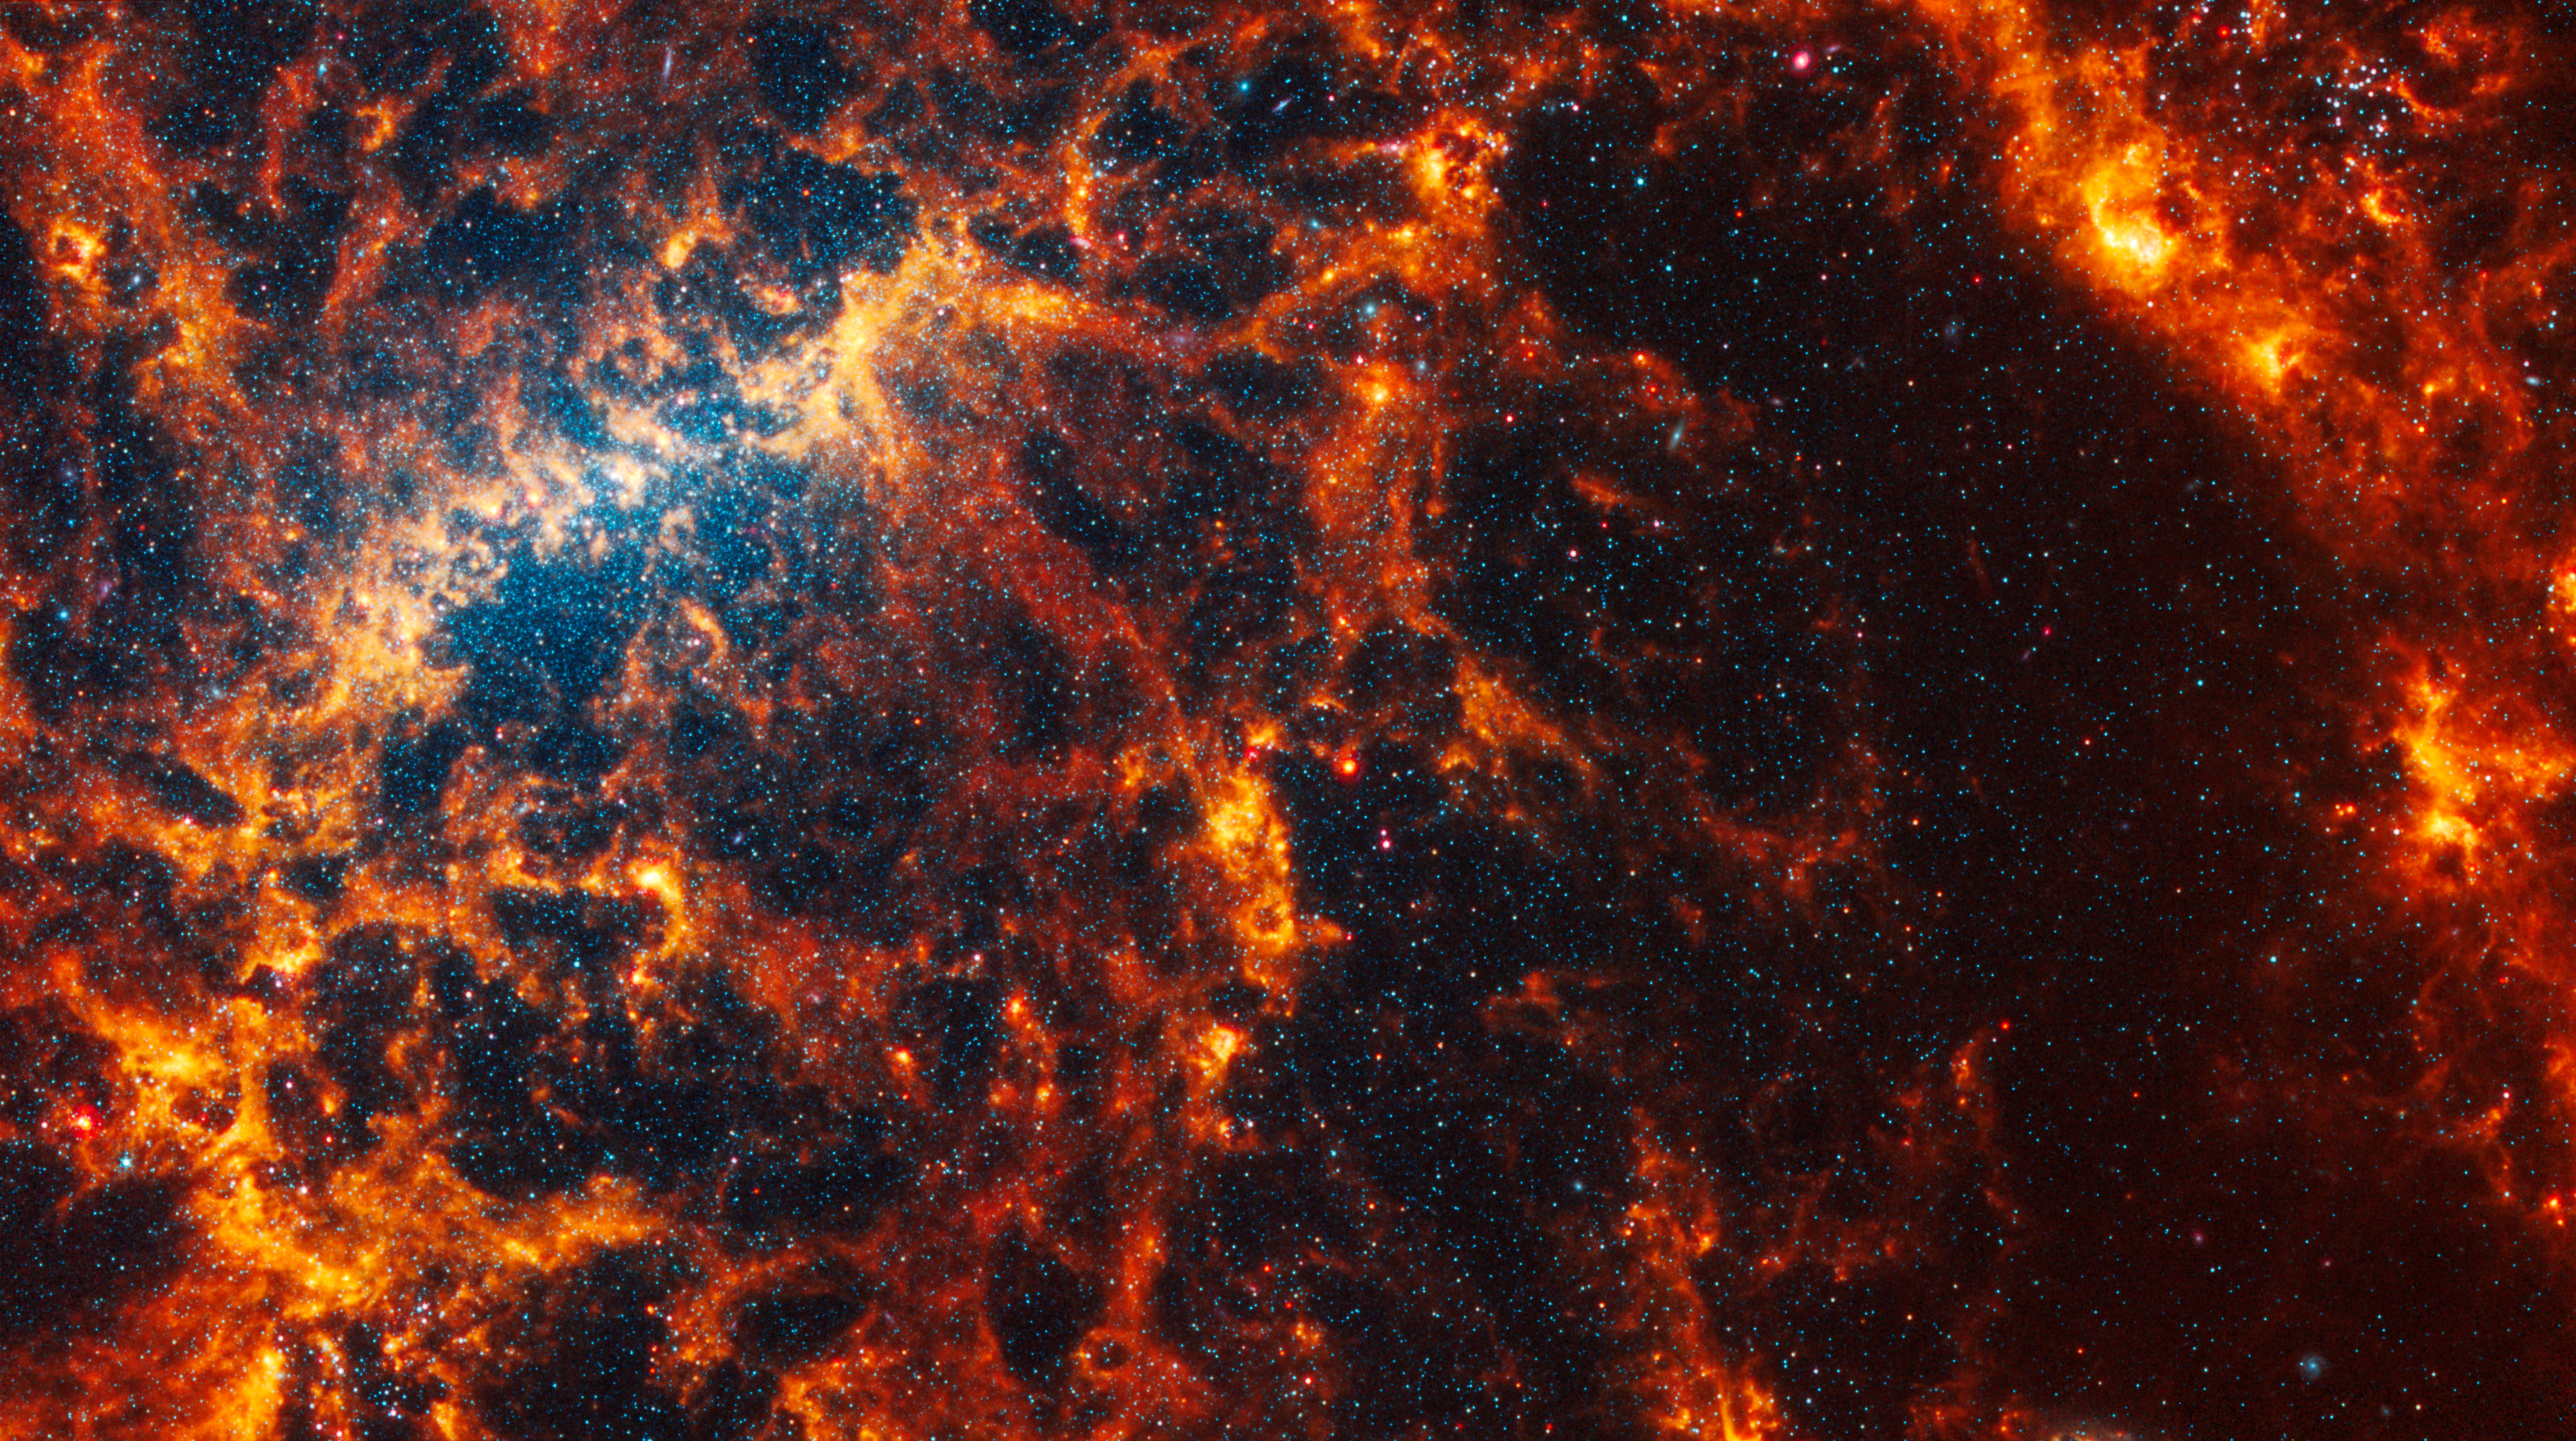

NGC 5068

This spiral galaxy was observed as part of the Physics at High Angular resolution in Nearby GalaxieS (PHANGS) program, a large project that includes observations from several space- and ground-based telescopes of many galaxies to help researchers study all phases of the star formation cycle, from the formation of stars within dusty gas clouds to the energy released in the process that creates the intricate structures revealed by Webb’s new images.

NGC 5068 is 20 million light-years away in the constellation Virgo.

Learn more about what can be seen in this vast collection of Webb images here.

Credit: NASA, ESA, CSA, STScI, J. Lee (STScI), T. Williams (Oxford), PHANGS Team